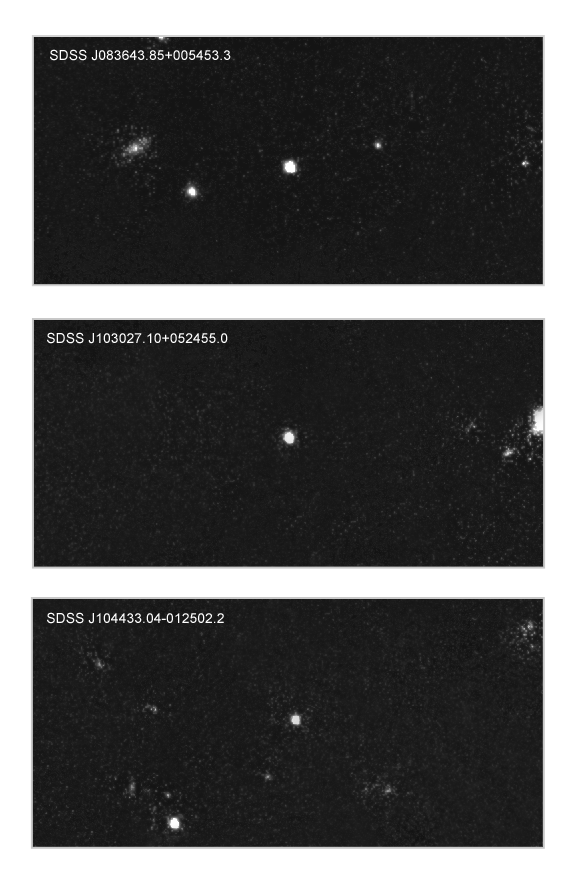

Remote quasars showing large amounts of iron.

The remote quasars SDSS J083643.85+005453.3, SDSS J103027.10+052455.0, and SDSS J104433.04-012502.2, as observed with the NICMOS (Near Infrared Camera and Multi-Object Spectrograph) instrument on board the NASA/ESA Hubble Space Telescope. The quasars are shown in the centre of each image and are some of the most distant quasars known (redshifts of 5.82, 6.28, and 5.78). Quasars are some of the most exotic and ultraluminous sources known. They are powered by supermassive black holes in their centres. By splitting the infrared light from these quasars into its individual colours, a group of astronomers found huge quantities of iron. They believe that this element is produced in the very first generation of stars. This is the first time you can attribute a detected element directly to the very first stars in the Universe. 'It is like holding the ashes of the first stars in our hands', say the astronomers. It implies that the first stars in the Universe were formed as early as 200 million years after the Big Bang, several hundred million years earlier than previously thought. Hubble's position above the atmosphere allows it to detect the infrared region of the spectrum that includes iron's signature at about 1.6-1.7 microns. This range is normally absorbed by the Earth's atmosphere and unavailable to Earth-bound telescopes.

Credit: European Space Agency and Wolfram Freudling (Space Telescope-European Coordinating Facility/European Southern Observatory, Germany)